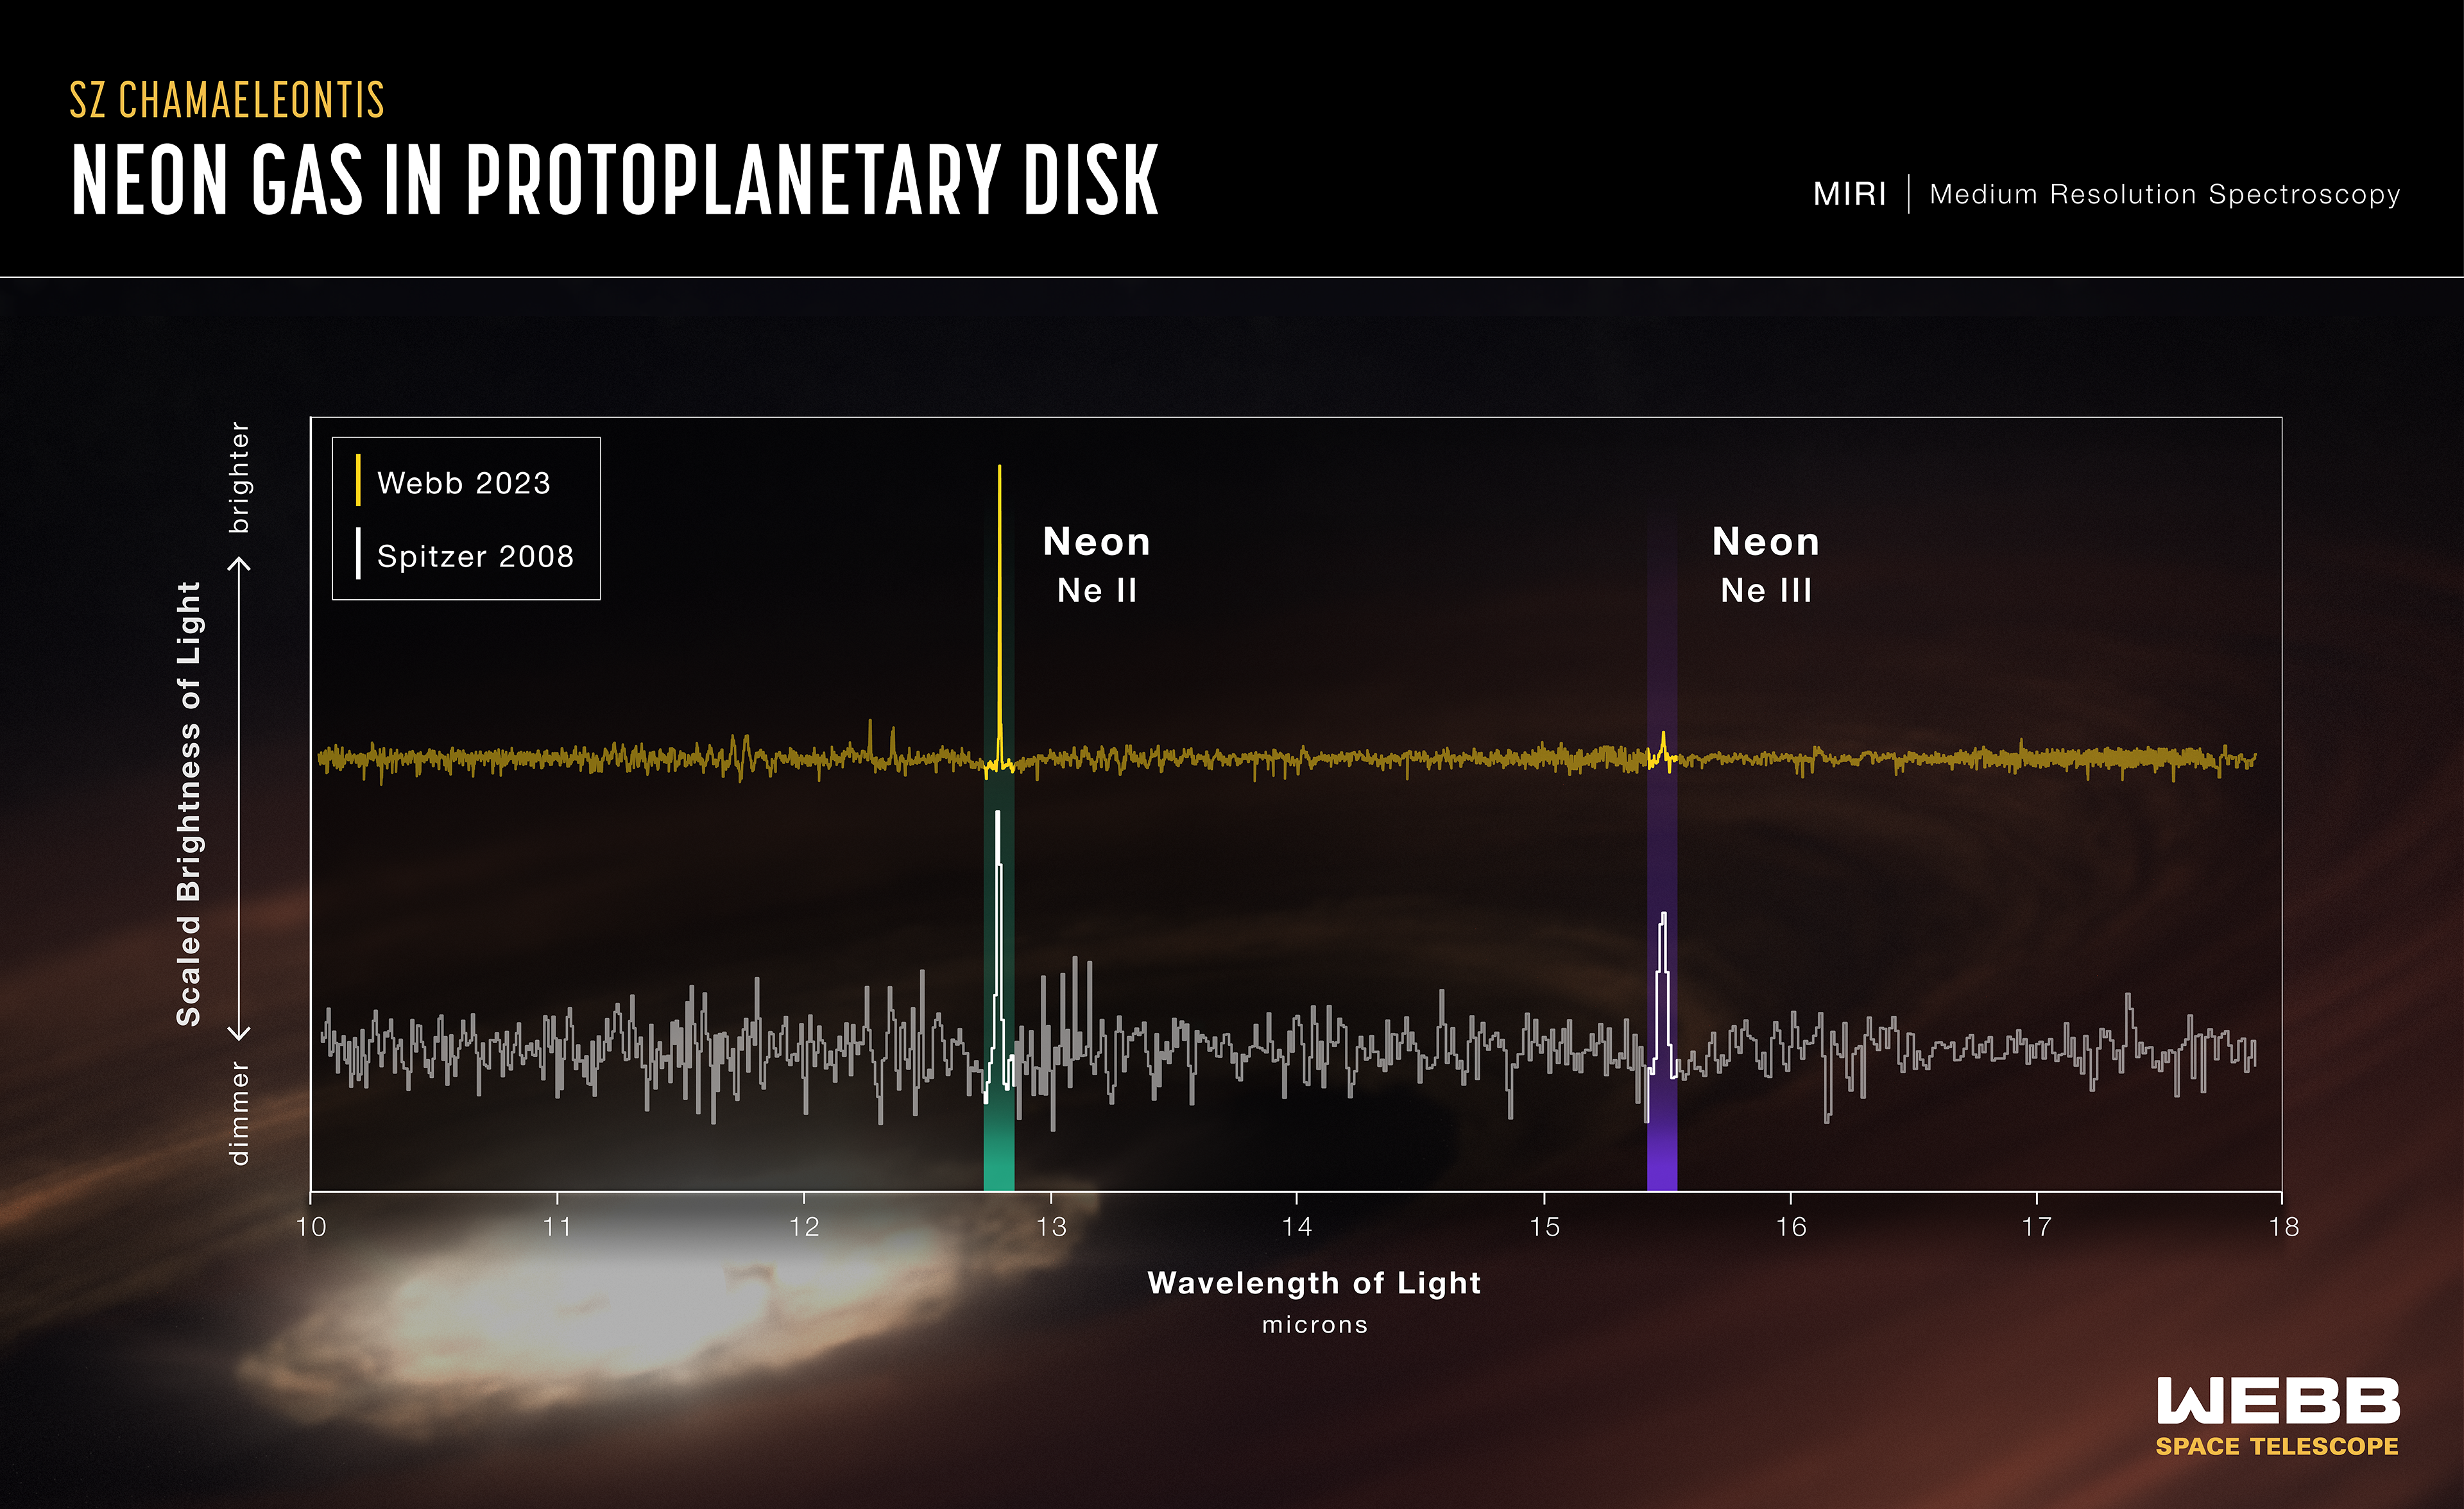

Neon gas in protoplanetary disk SZ Chamaeleontis

In 2008 NASA’s Spitzer Space Telescope found a protoplanetary disk unlike any other. The dusty disk of gas surrounding the young Sun-like star SZ Chamaeleontis (SZ Cha) was being battered by extreme ultraviolet radiation – something previously seen only in computer models, never in the real universe. Planets in this system would have more time to form than in a disk being evaporated by X-rays, which is the norm. However, when the NASA/ESA/CSA James Webb Space Telescope followed up on SZ Cha, it found nothing out of the ordinary, as the ratio of neon II to III was within typical levels (no abundance of ultraviolet). In a short space of cosmic time, conditions in SZ Cha’s disk had changed, leaving astronomers to untangle meaning from the mismatched data and its implications for the formation of other solar systems.

This is significant because protoplanetary disks are the stuff of future planetary systems – and those potential planets are in a race against time. Astronomers use neon as an indicator of the dominant radiation hitting the disk and causing it to evaporate. When extreme ultraviolet light is dominant, there is more neon III. That is the unusual circumstance that Spitzer observed in 2008. Typically, a disk is dominated by X-ray radiation, which evaporates the disk more quickly, leaving planets less time to form.

Researchers think the dramatic differences in neon detections are the result of a wind that, when present, absorbs ultraviolet light and leaves X-rays to impact the disk. They will continue using Webb to find other examples of variability in disk conditions, working toward a better understanding of how planetary systems develop around Sun-like stars.

Credit: NASA, ESA, CSA, STScI, G. Bacon (STScI)